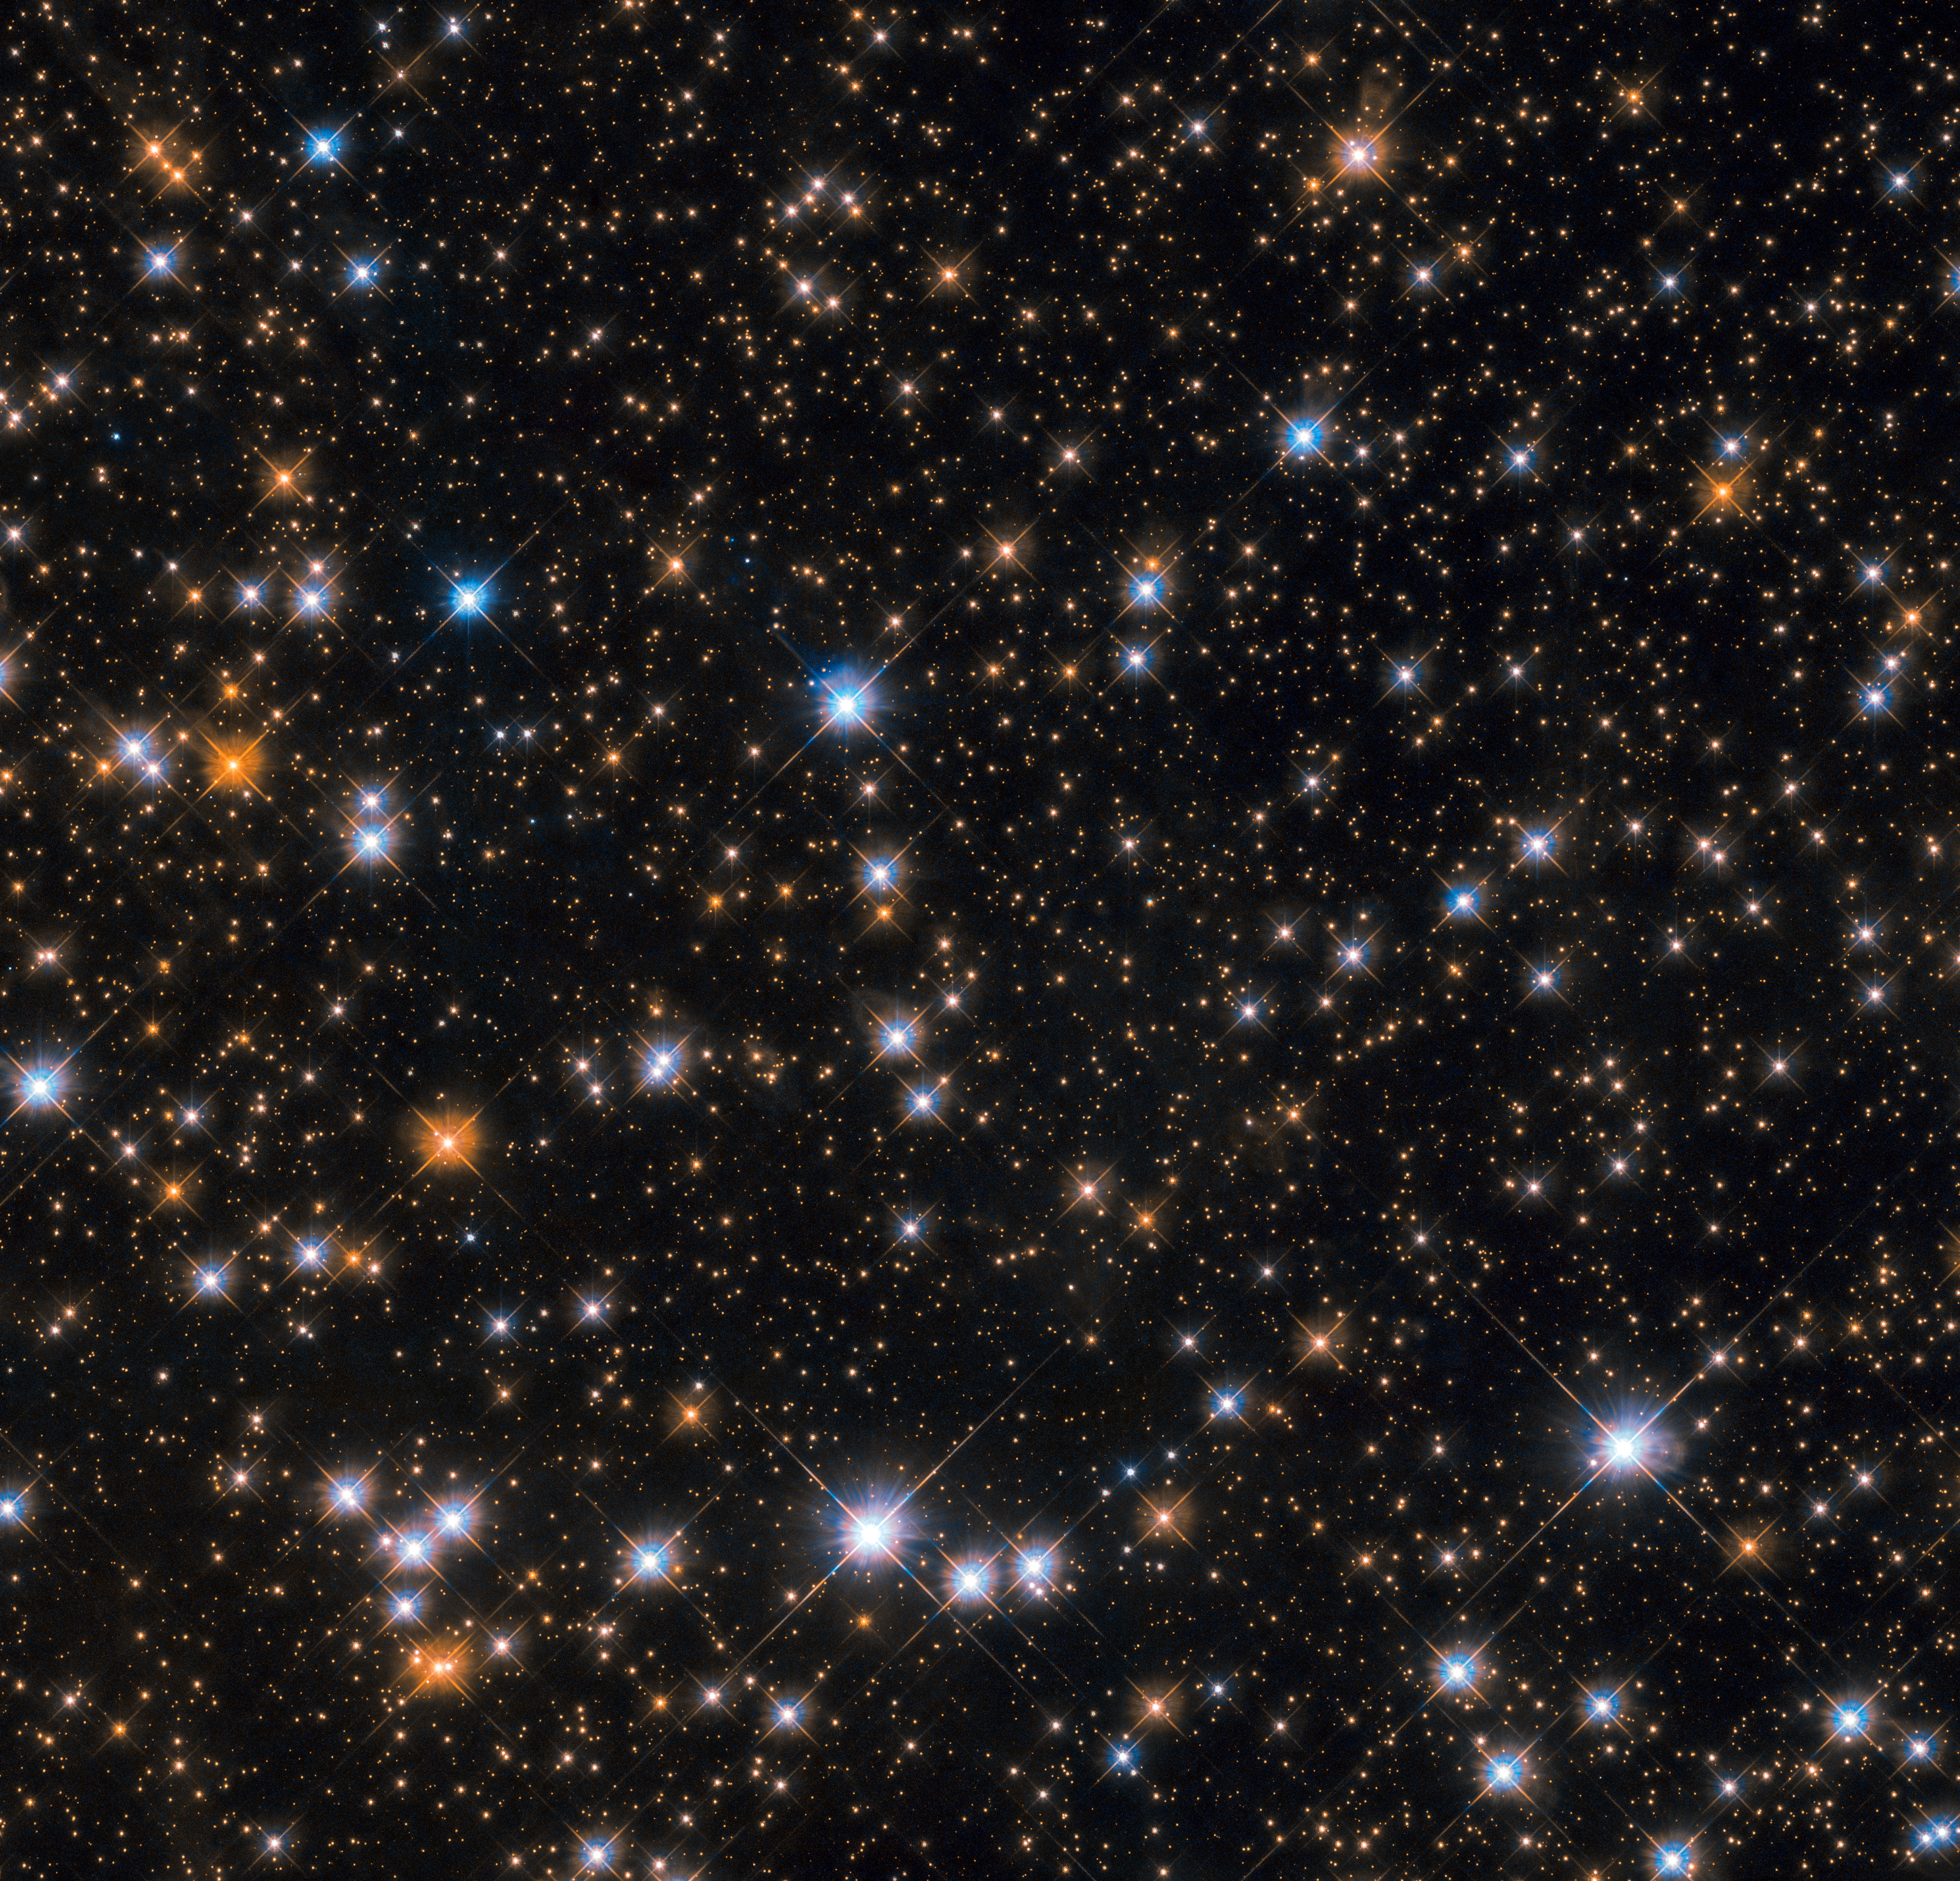

Wild cosmic ducks

This star-studded image shows us a portion of Messier 11, an open star cluster in the southern constellation of Scutum (The Shield). Messier 11 is also known as the Wild Duck Cluster, as its brightest stars form a “V” shape that somewhat resembles a flock of ducks in flight.

Messier 11 is one of the richest and most compact open clusters currently known. By investigating the brightest, hottest main sequence stars in the cluster astronomers estimate that it formed roughly 220 million years ago. Open clusters tend to contain fewer and younger stars than their more compact globular cousins, and Messier 11 is no exception: at its centre lie many blue stars, the hottest and youngest of the cluster’s few thousand stellar residents.

The lifespans of open clusters are also relatively short compared to those of globular ones; stars in open clusters are spread further apart and are thus not as strongly bound to each other by gravity, causing them to be more easily and quickly drawn away by stronger gravitational forces. As a result Messier 11 is likely to disperse in a few million years as its members are ejected one by one, pulled away by other celestial objects in the vicinity.

Credit: ESA/Hubble & NASA, P. Dobbie et al.